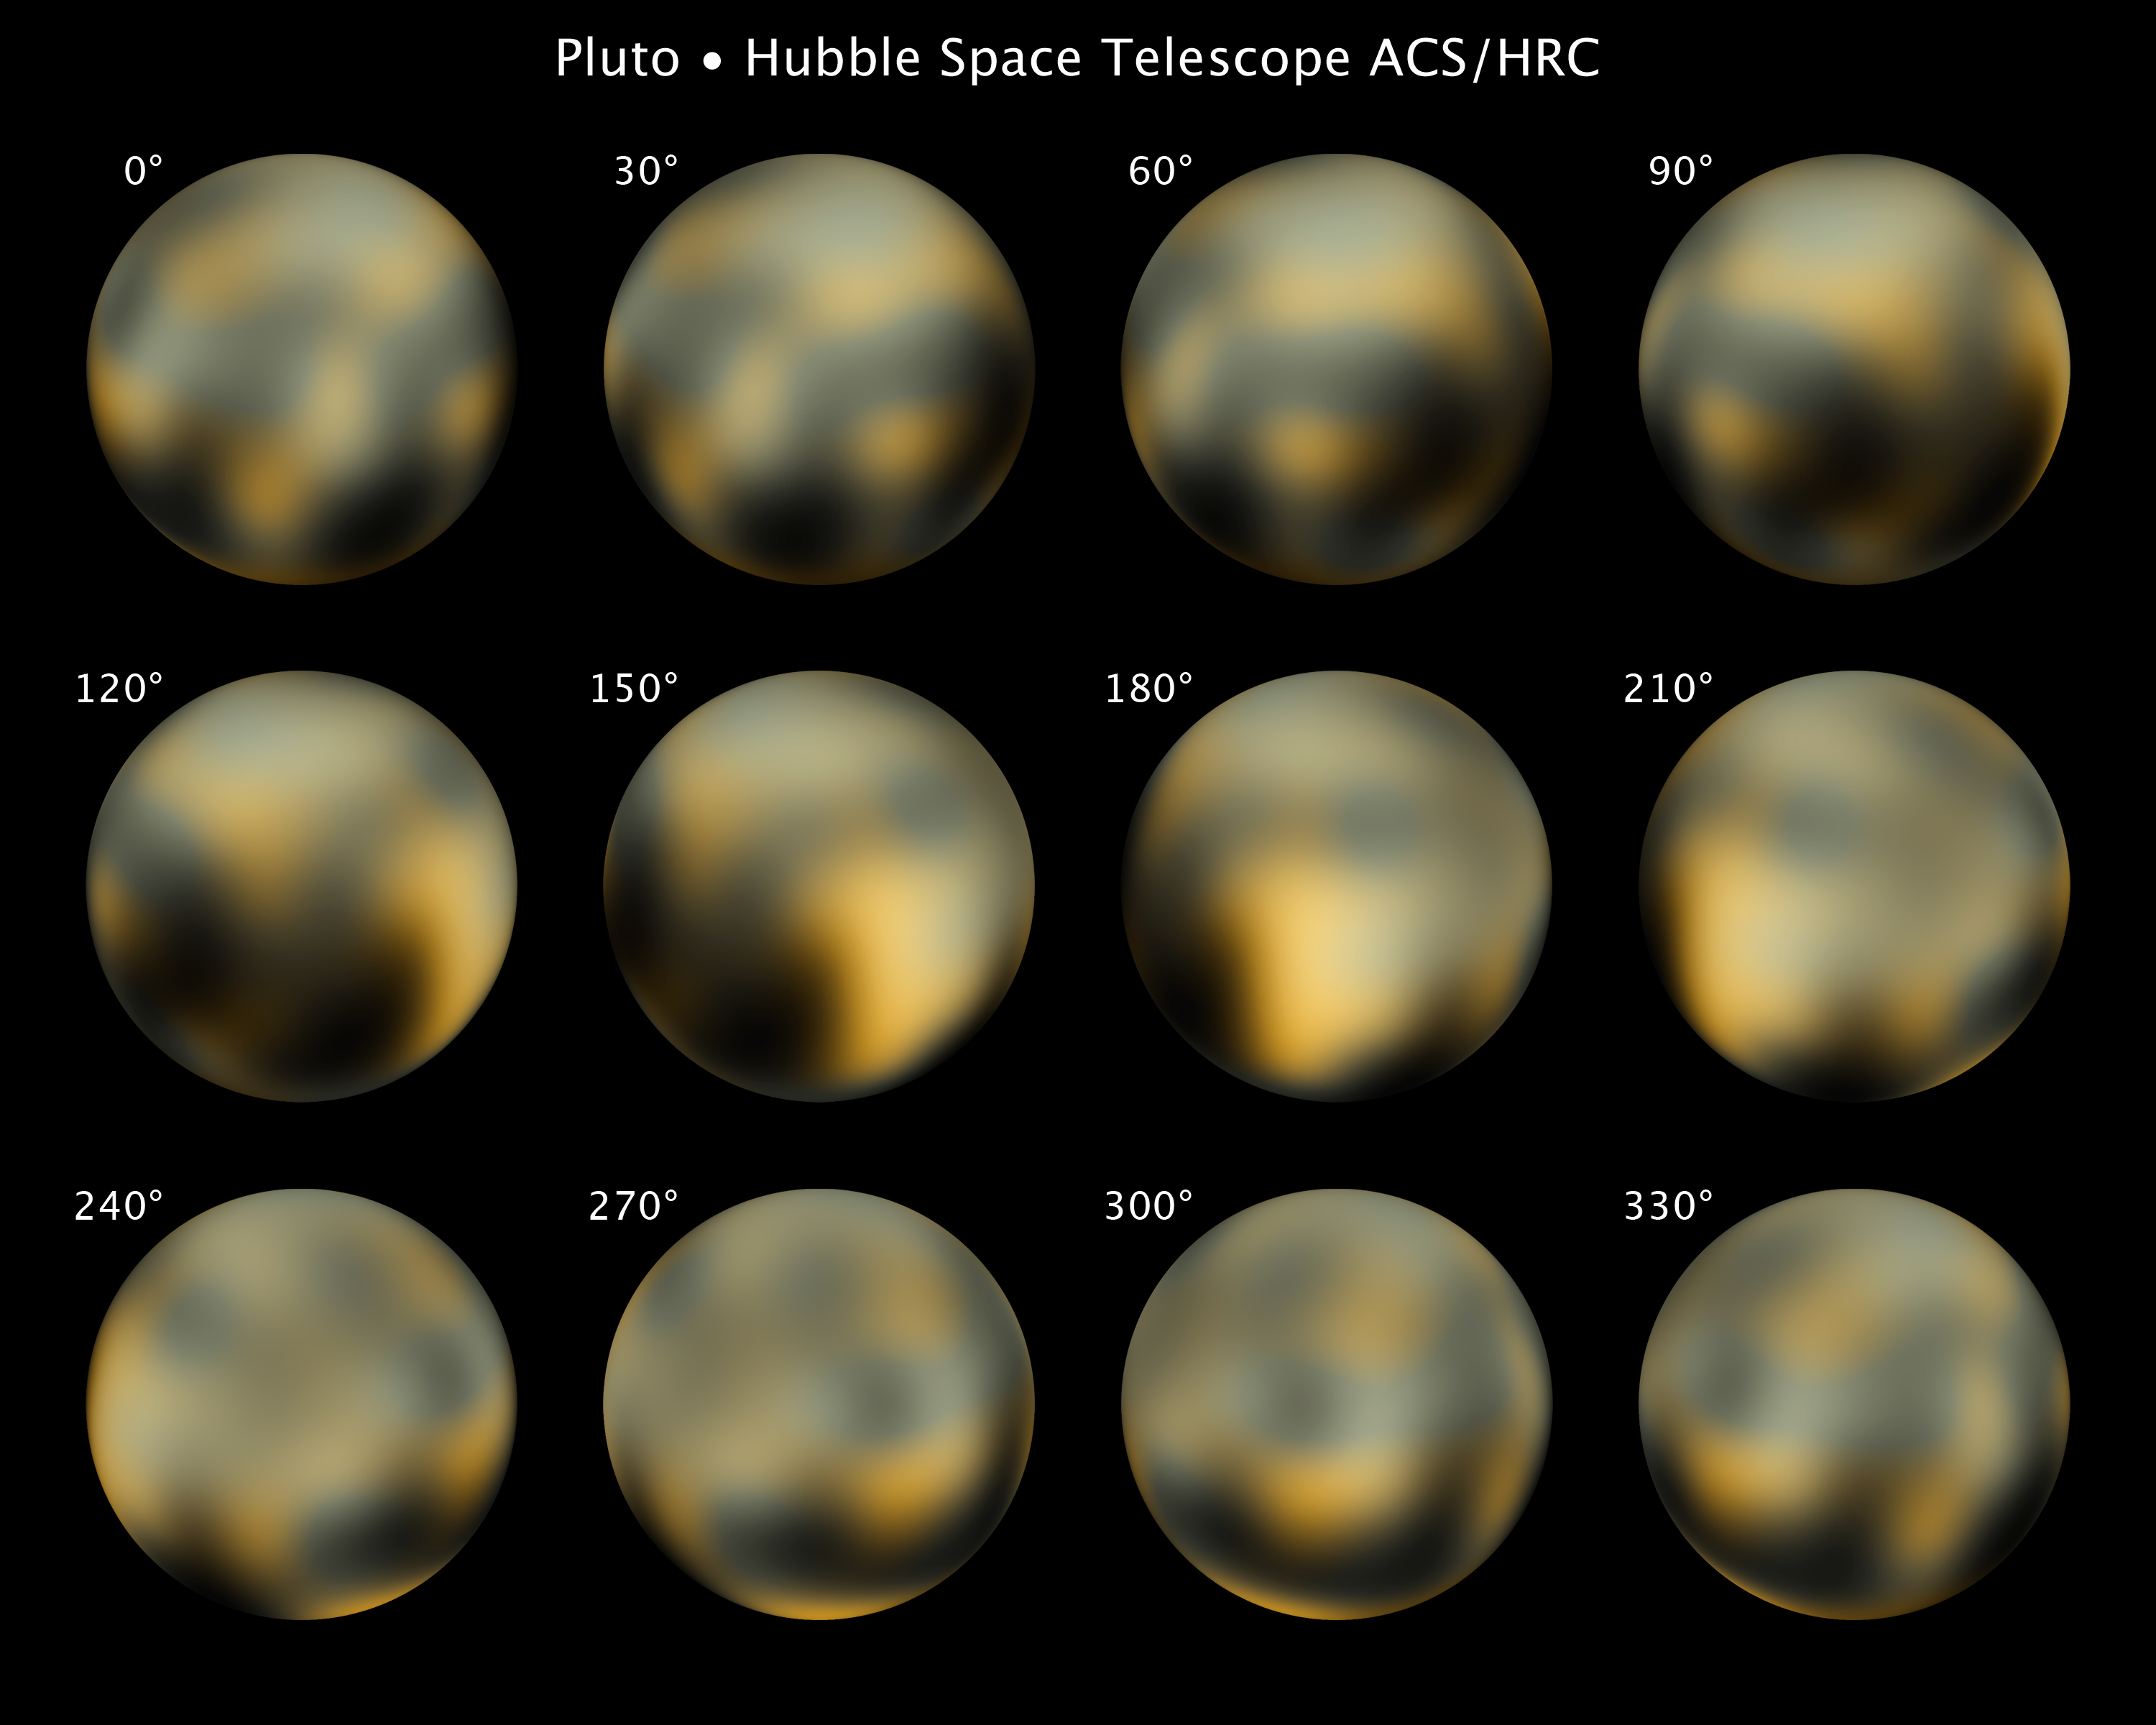

Hubble's full photomap of Pluto

This is the most detailed view to date of the entire surface of the dwarf planet Pluto, as constructed from multiple NASA/ESA Hubble Space Telescope photographs taken from 2002 to 2003. NASA's New Horizons space probe, now halfway to Pluto, will get sharper images of Pluto when it is six months away from a close flyby in 2015.

Hubble's view isn't sharp enough to see craters or mountains, if they exist on the surface, but Hubble reveals a complex-looking and variegated world with white, dark-orange, and charcoal-black terrain. The overall colour is believed to be a result of ultraviolet radiation from the distant Sun breaking up methane that is present on Pluto's surface, leaving behind a dark, molasses-coloured, carbon-rich residue.

Pluto is so small and distant that the task of resolving the surface is as challenging as trying to see the markings on a soccer ball 65 kilometres away. The Hubble raw images are a few pixels wide. But through a technique called dithering, multiple, slightly offset pictures can be combined through computer-image processing to synthesize a higher-resolution view than could be seen in a single exposure. This series of pictures took four years and 20 computers operating continuously and simultaneously to accomplish.

Credit: NASA, ESA and M. Buie (Southwest Research Institute)